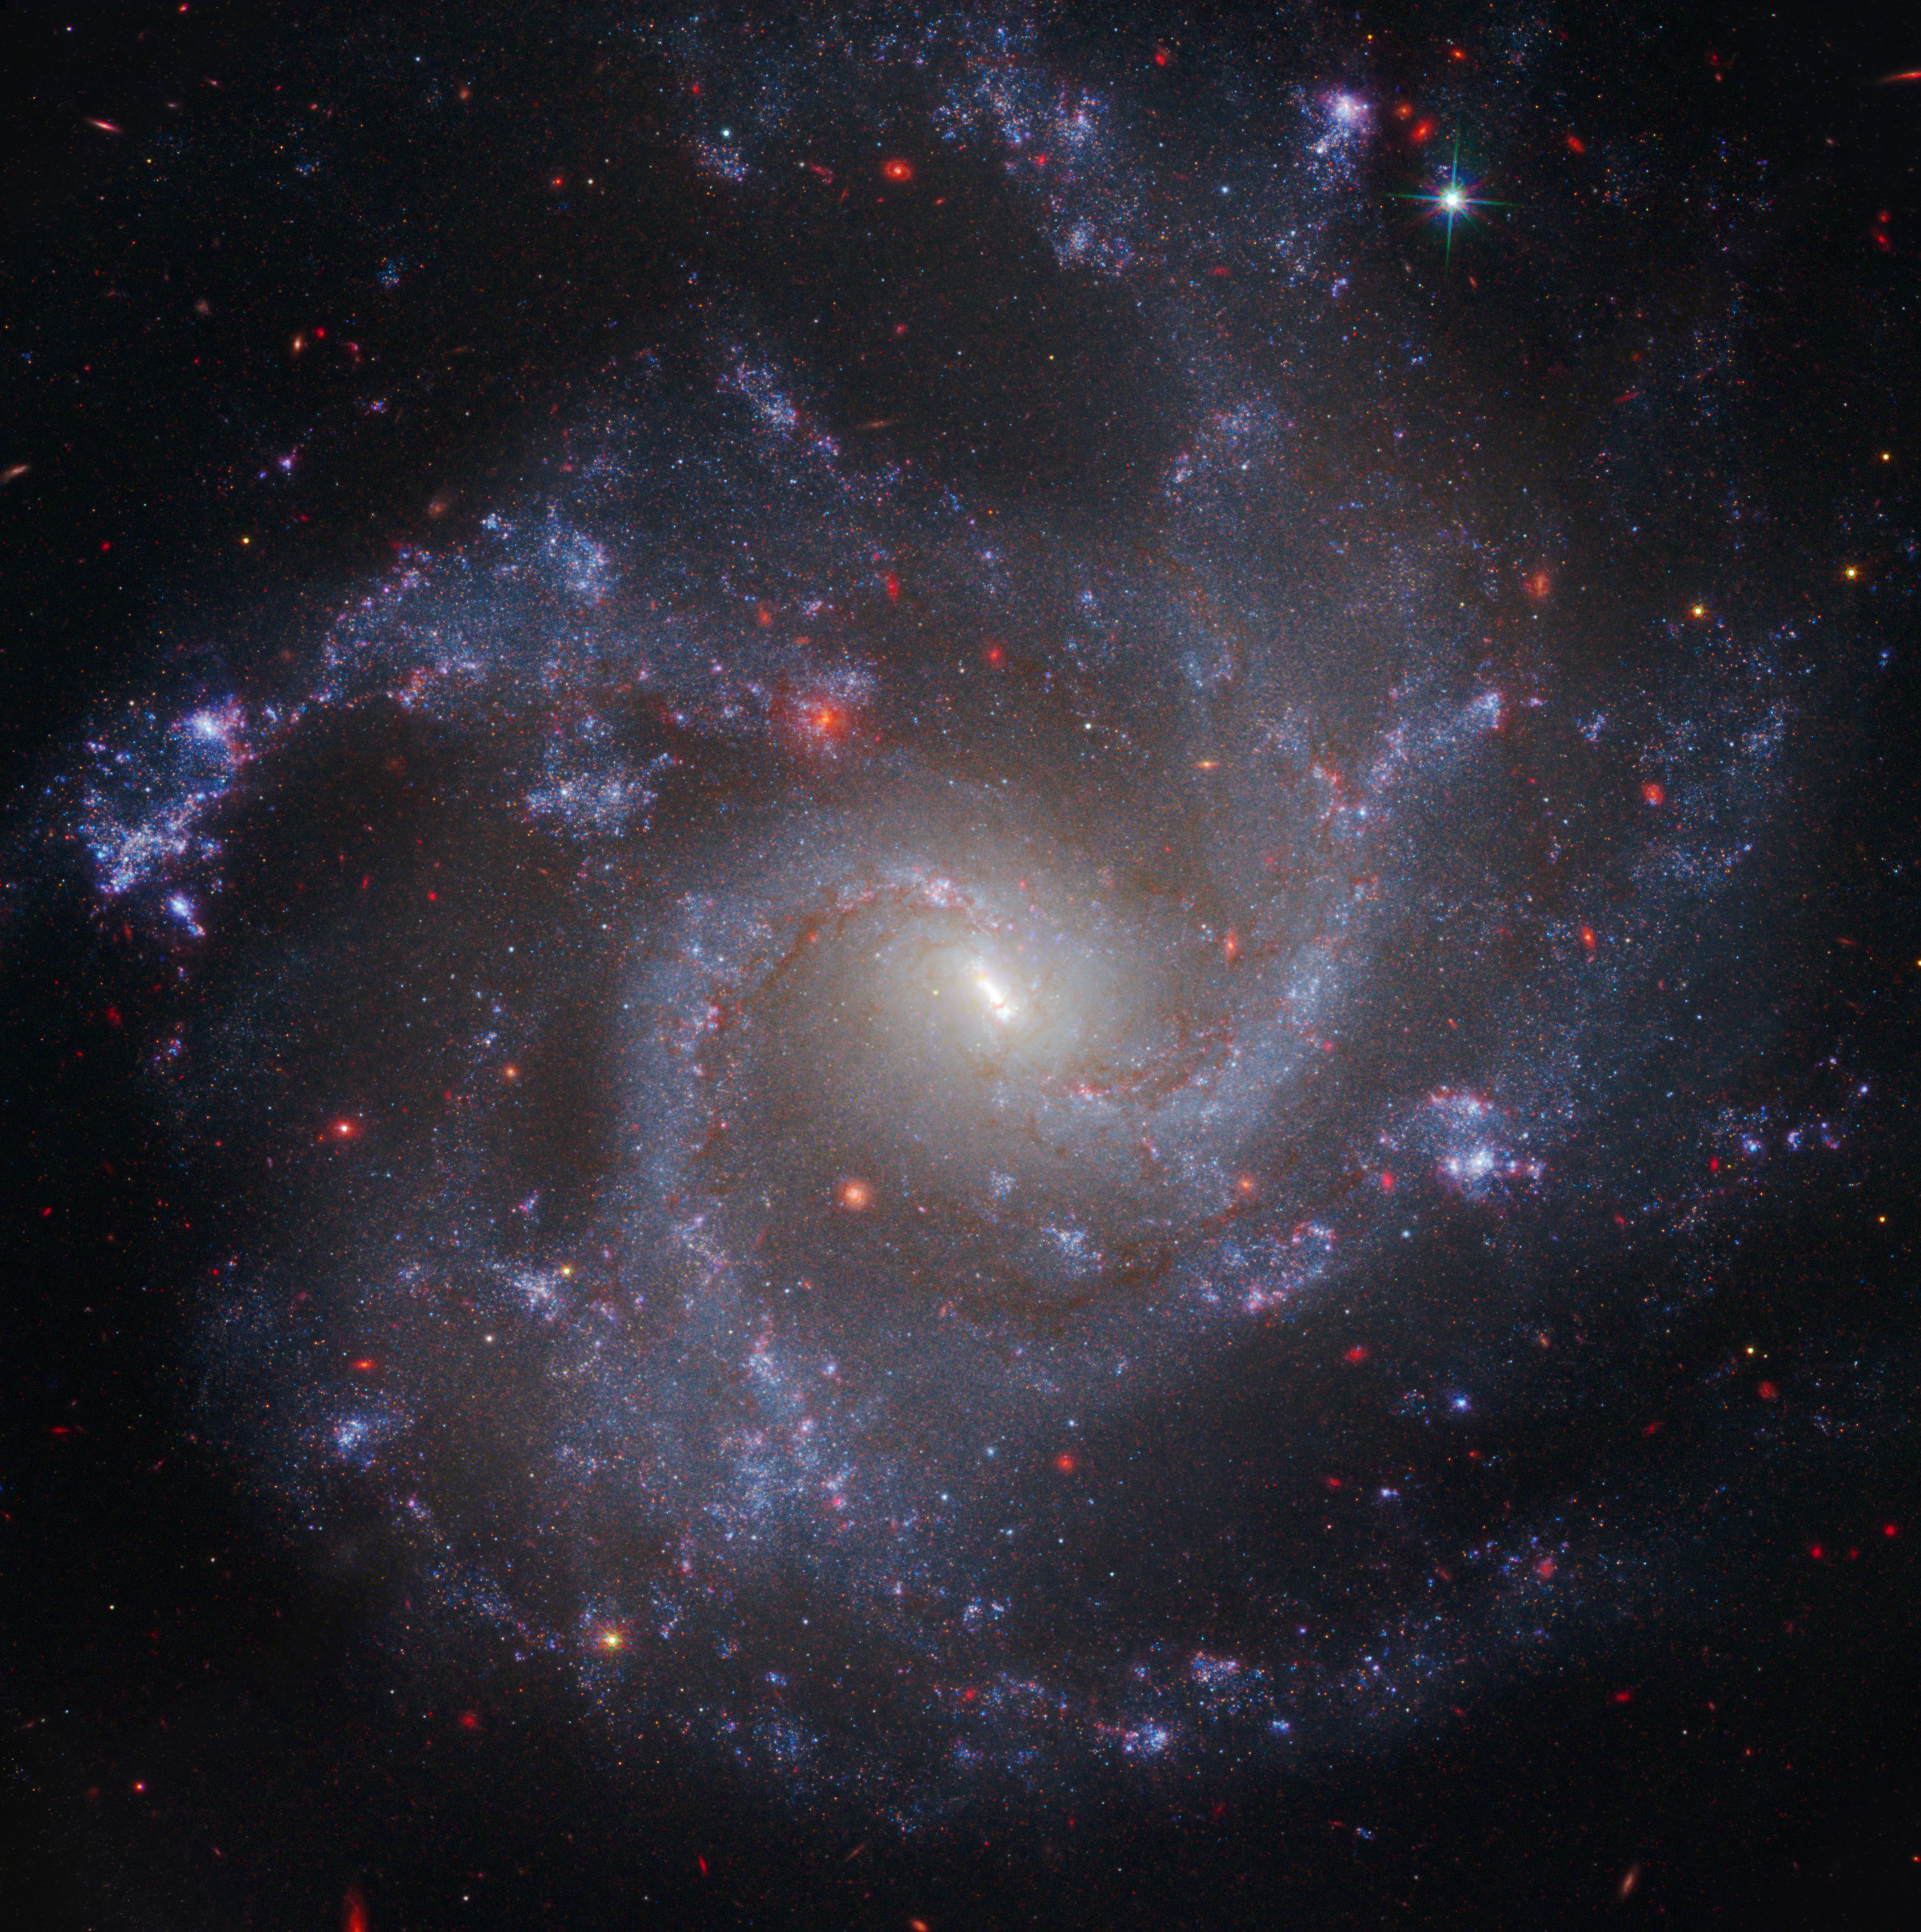

NGC 5468 — Cepheid host galaxy

This image of NGC 5468, a galaxy located about 130 million light-years from Earth, combines data from the Hubble and James Webb space telescopes. This is the most distant galaxy in which Hubble has identified Cepheid variable stars. These are important milepost markers for measuring the expansion rate of the Universe. The distance calculated from Cepheids has been cross-correlated with a Type Ia supernova in the galaxy. Type Ia supernovae are so bright they are used to measure cosmic distances far beyond the range of the Cepheids, extending measurements of the Universe’s expansion rate deeper into space.

Credit: NASA, ESA, CSA, STScI, A. Riess (JHU/STScI)